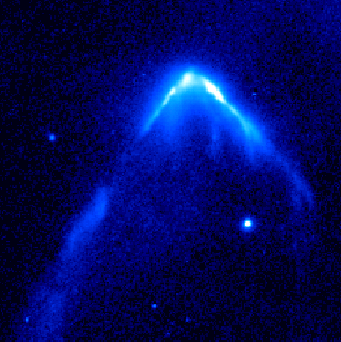

Hubble Image of Stellar Bow Shock (2 of 4)

Resembling a comet streaking across the sky this speedy star is plowing through a region of dense interstellar gas and creating a brilliant arrowhead structure and a trailing tail of glowing gas. The star is one of 14 young runaway stars spotted by the Advanced Camera for Surveys between October 2005 and July 2006.

Credit: NASA, ESA and R. Sahai (NASA's Jet Propulsion Laboratory)